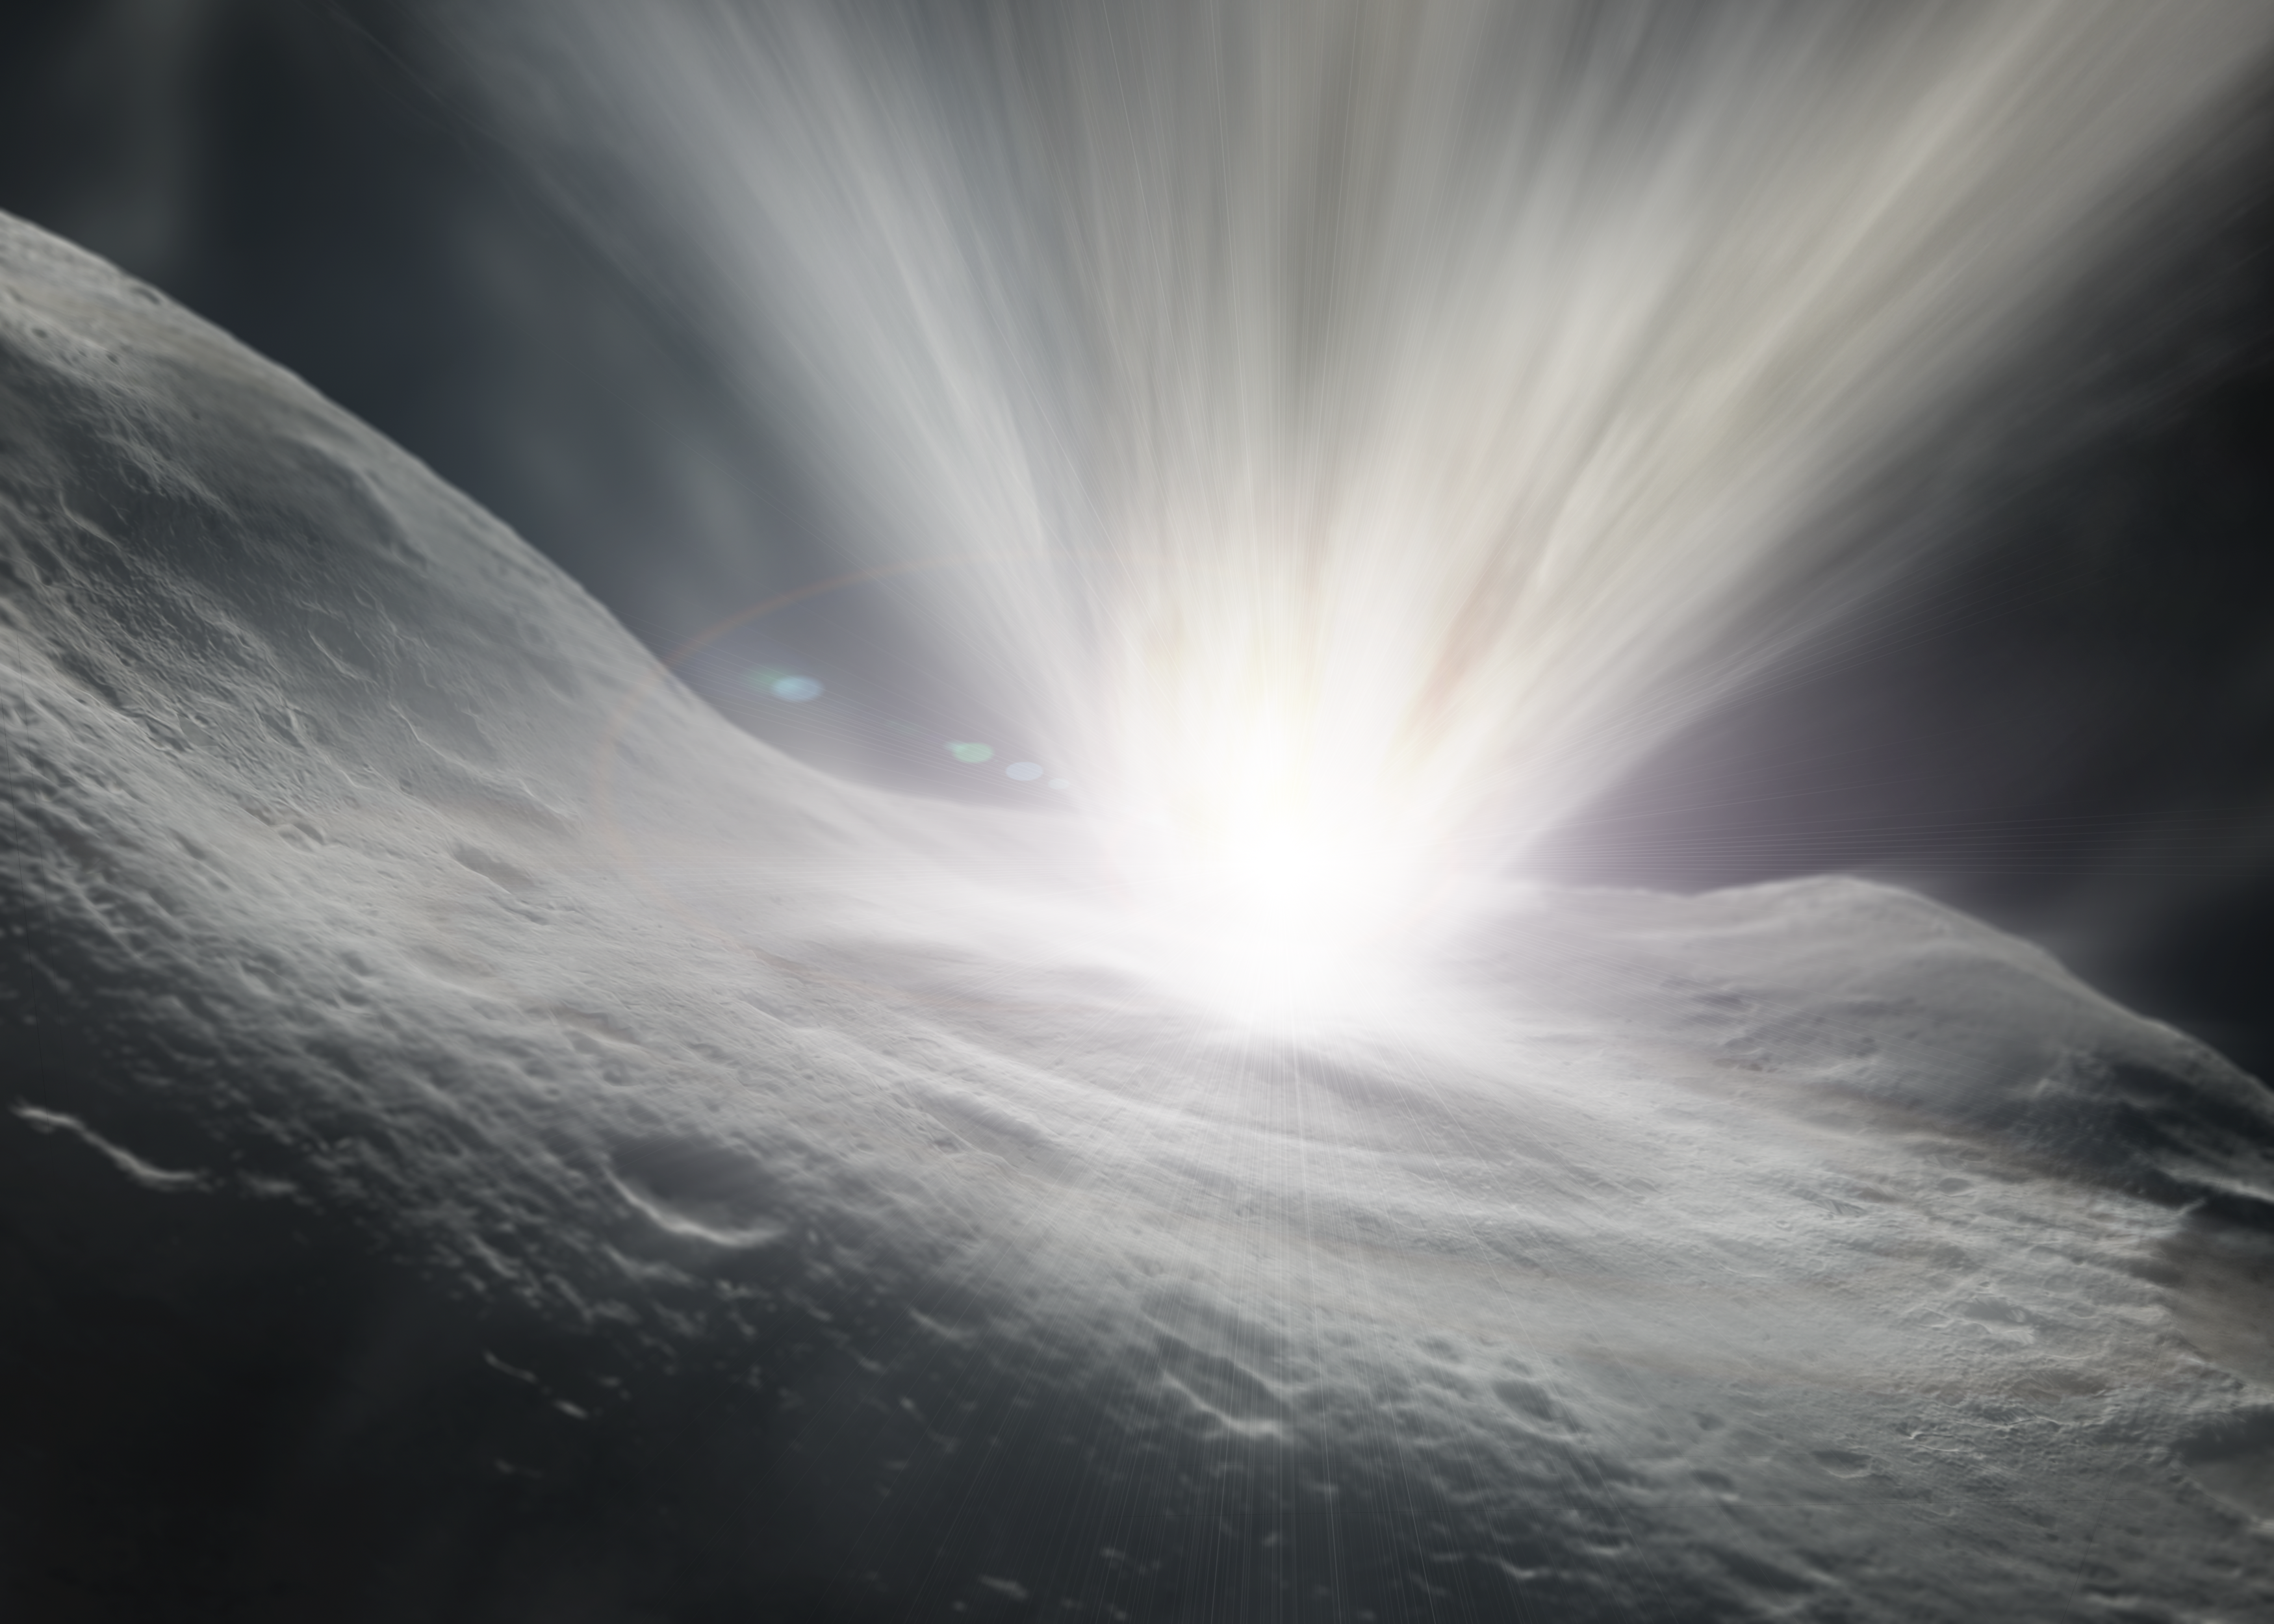

Impact! [artist's impression]

NASA's Deep Impact impactor probe hits comet Tempel 1 (artist's impression).

Credit: ESA & NASA